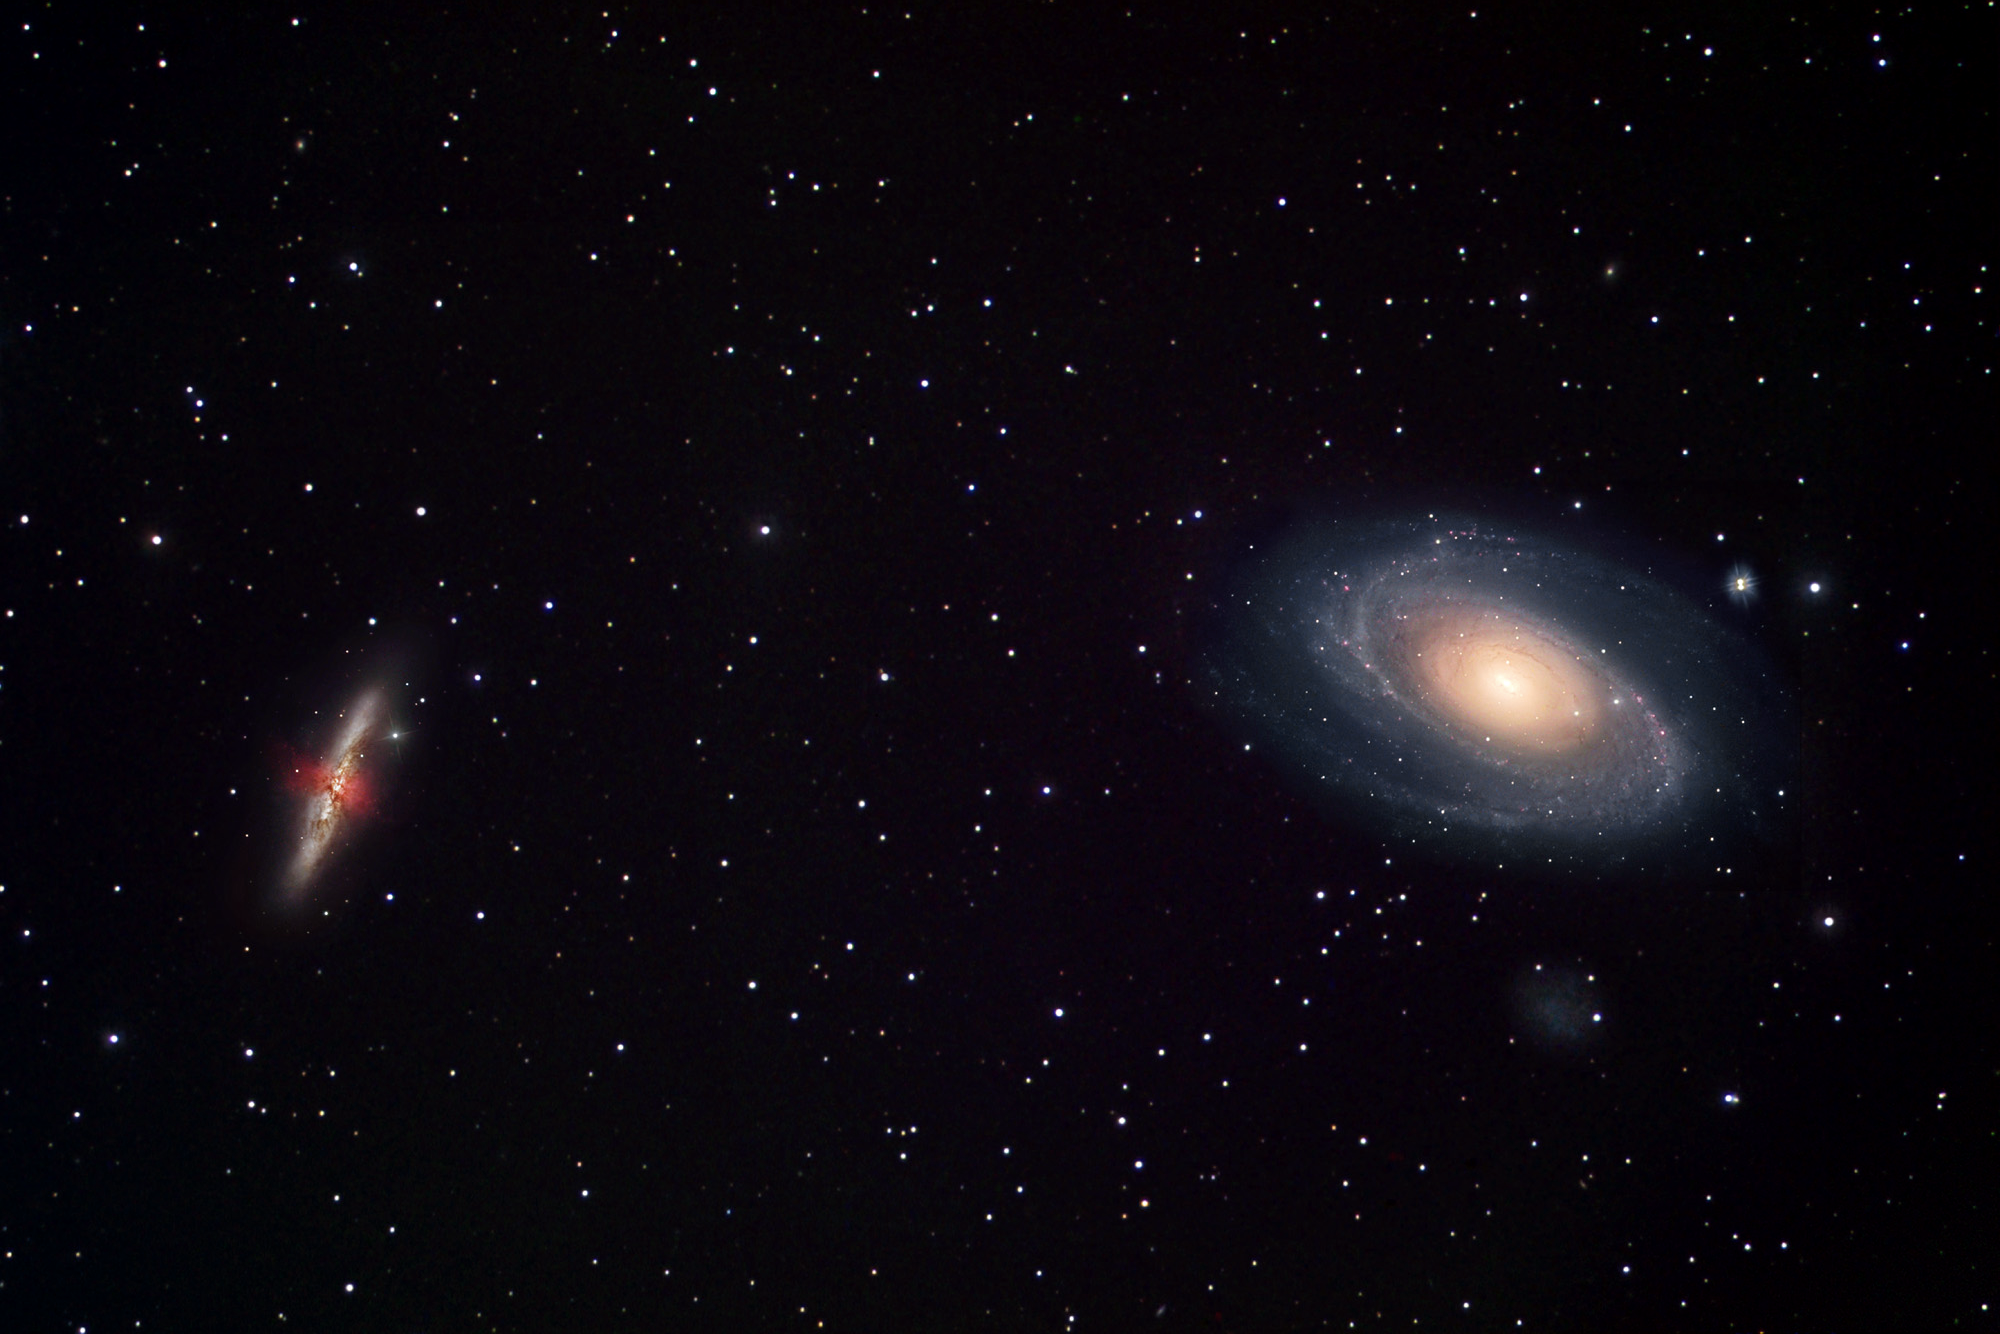

The dynamic duo, Messier 81 and 82 (ground-based)

This wide-angle image taken by astrophotographer Robert Gendler shows the amazing duo of Messier 81 (right) and Messier 82 (left). These two mighty galaxies in the Plough (Ursa Major) belong to some of the most famous and beloved galaxies known to amateur astronomers. This may be one of the reasons that Supernova 1993J was discovered by the Spanish amateur astronomer Francisco Garcia Diaz and not a professional astronomer.

The violent star-forming activity in the neighbouring Messier 82 gives rise to a strong galactic wind that is spewing knotty filaments of hydrogen and nitrogen gas (seen in red) out of its centre.

Credit: Robert Gendler (http://www.robgendlerastropics.com/)